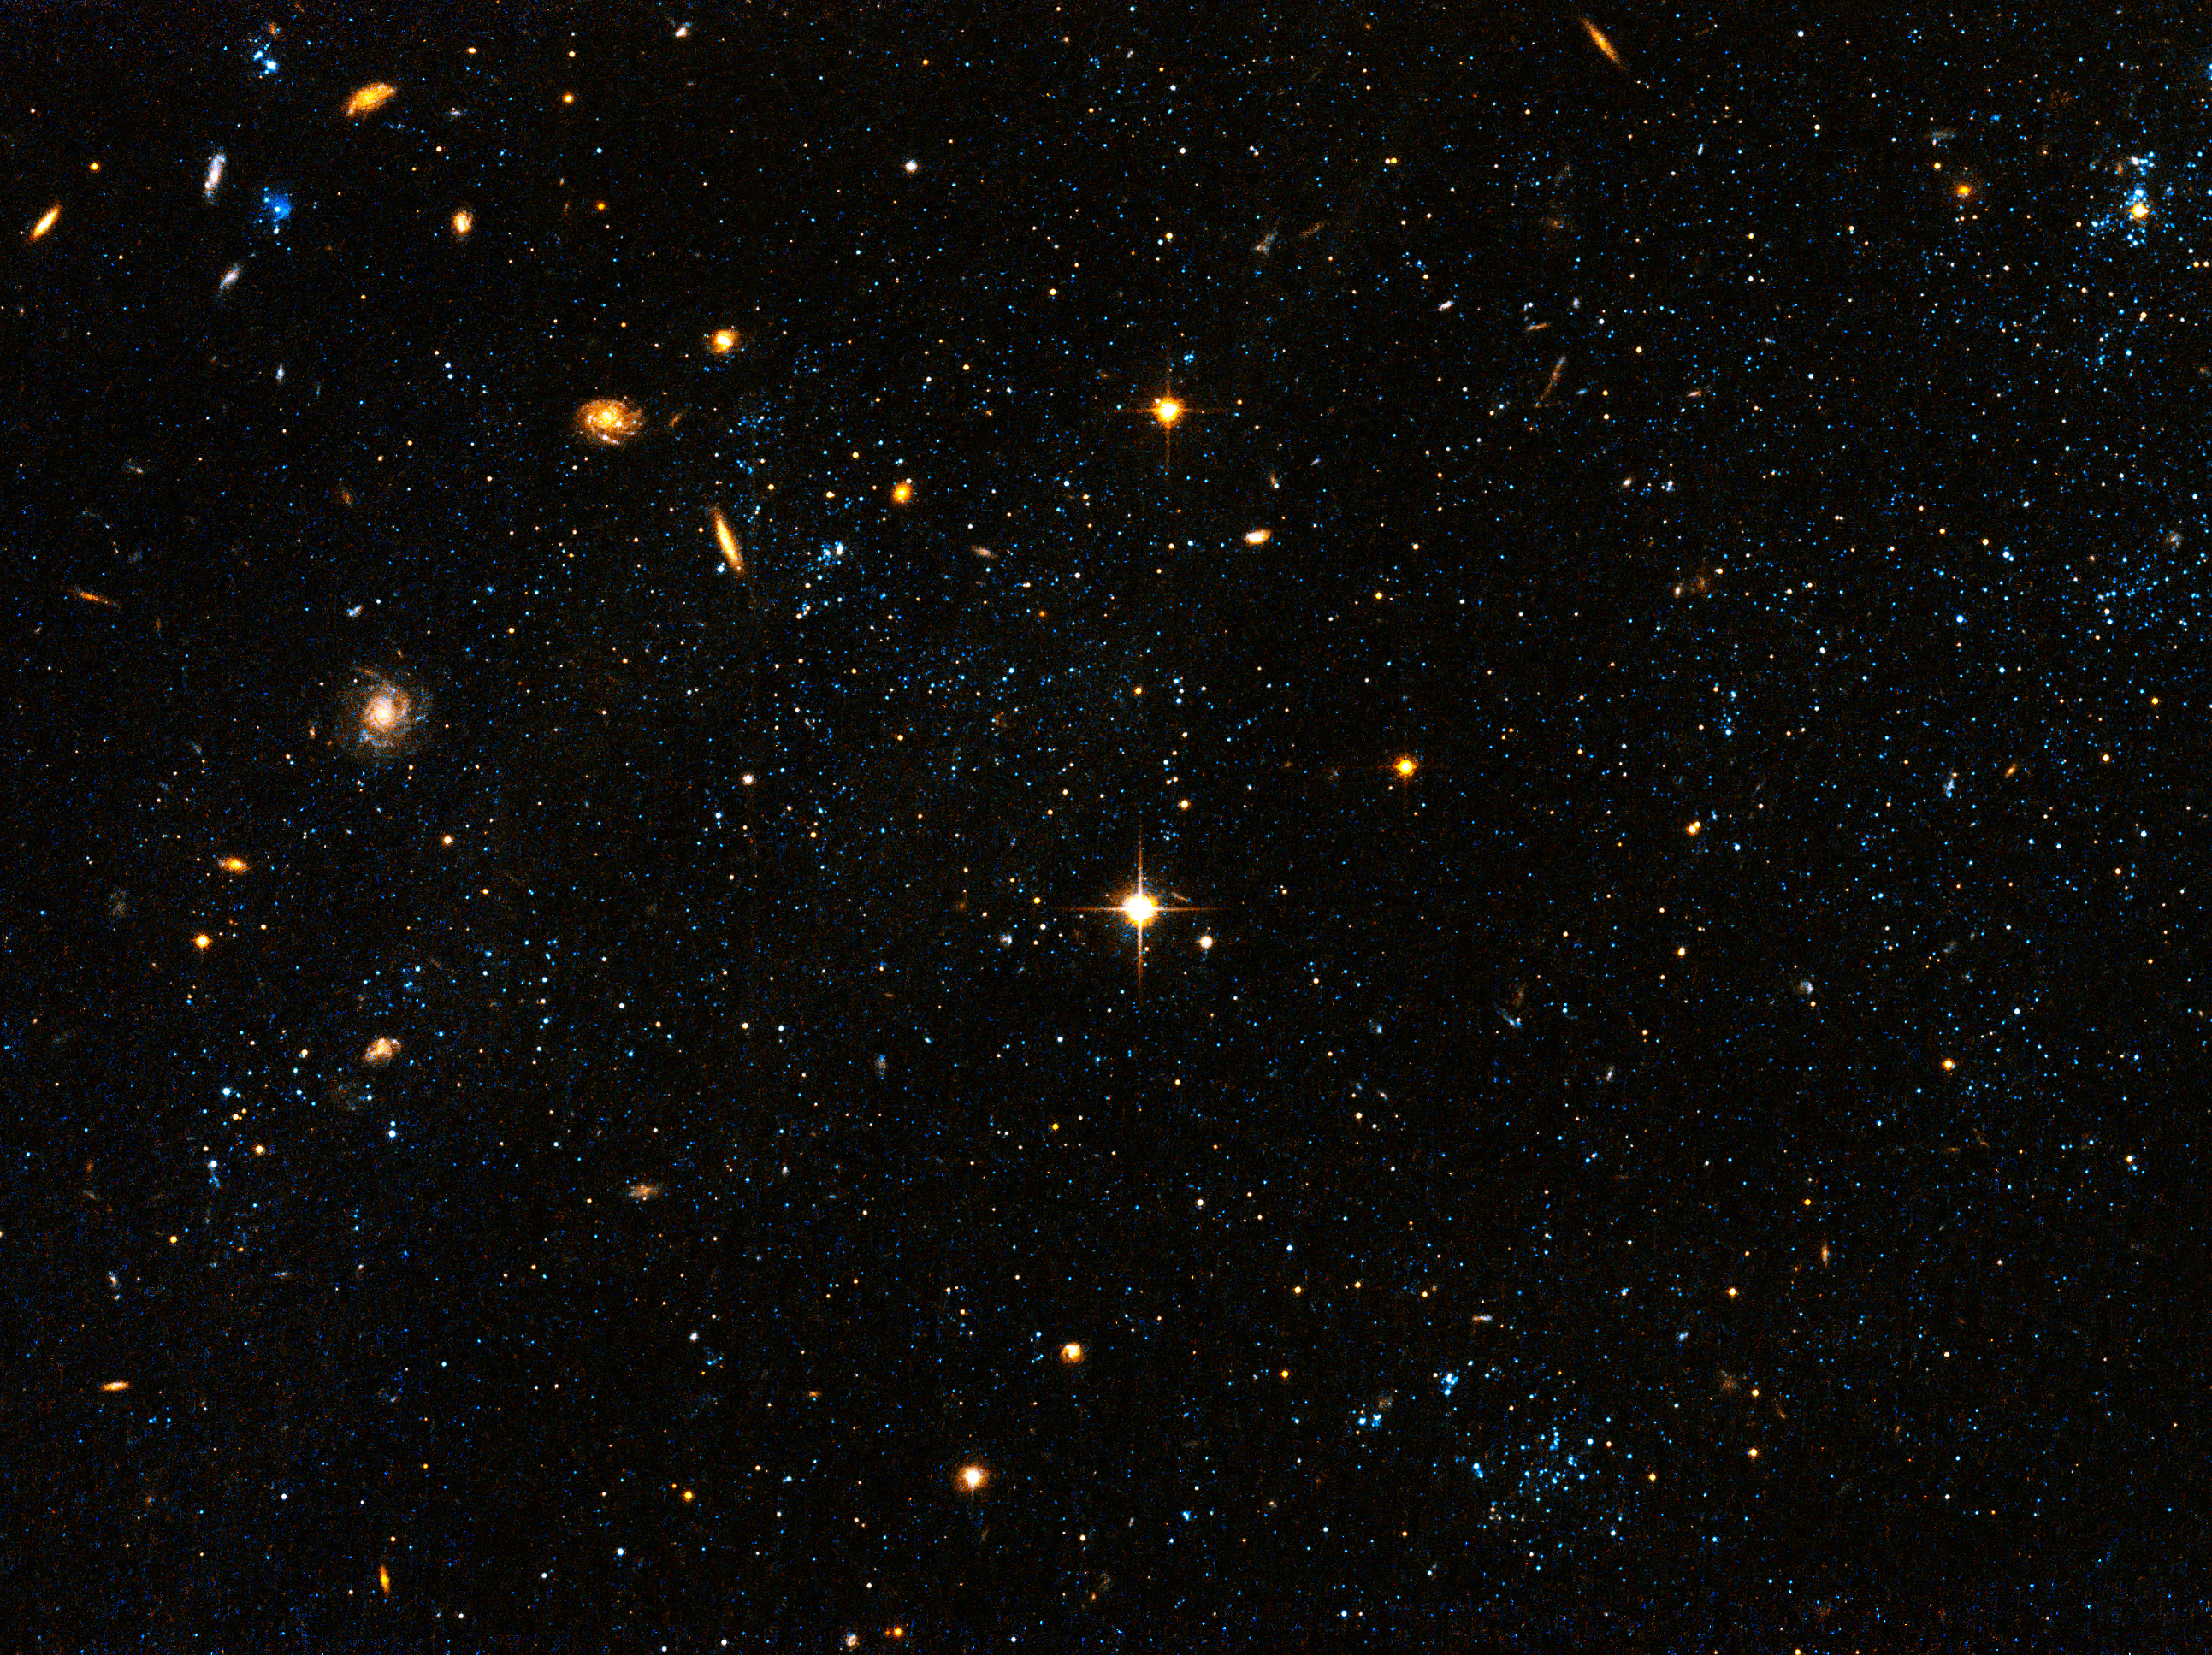

Hubble Space Telescope visible light image "blue blobs"

A Hubble Space Telescope visible light image of bright blue star clusters found along a wispy bridge of gas that was tidally stretched between the two galaxies, and a third companion galaxy not seen in this picture. This is not the place astronomers expect to find star clusters because the density of gas is so low. Turbulence in the gas may have enhanced the density locally to trigger starbirth. The so-called "blue blobs" are clumped together in a structure called Arp's Loop. Hubble reveals the clusters contain the equivalent of five Orion Nebulae. Analysis of the stellar population in the clusters yields an age of approximately 200 million years, which coincides with the epoch of the collision.

Credit: NASA, ESA, and D. de Mello (Catholic University of America/GSFC)